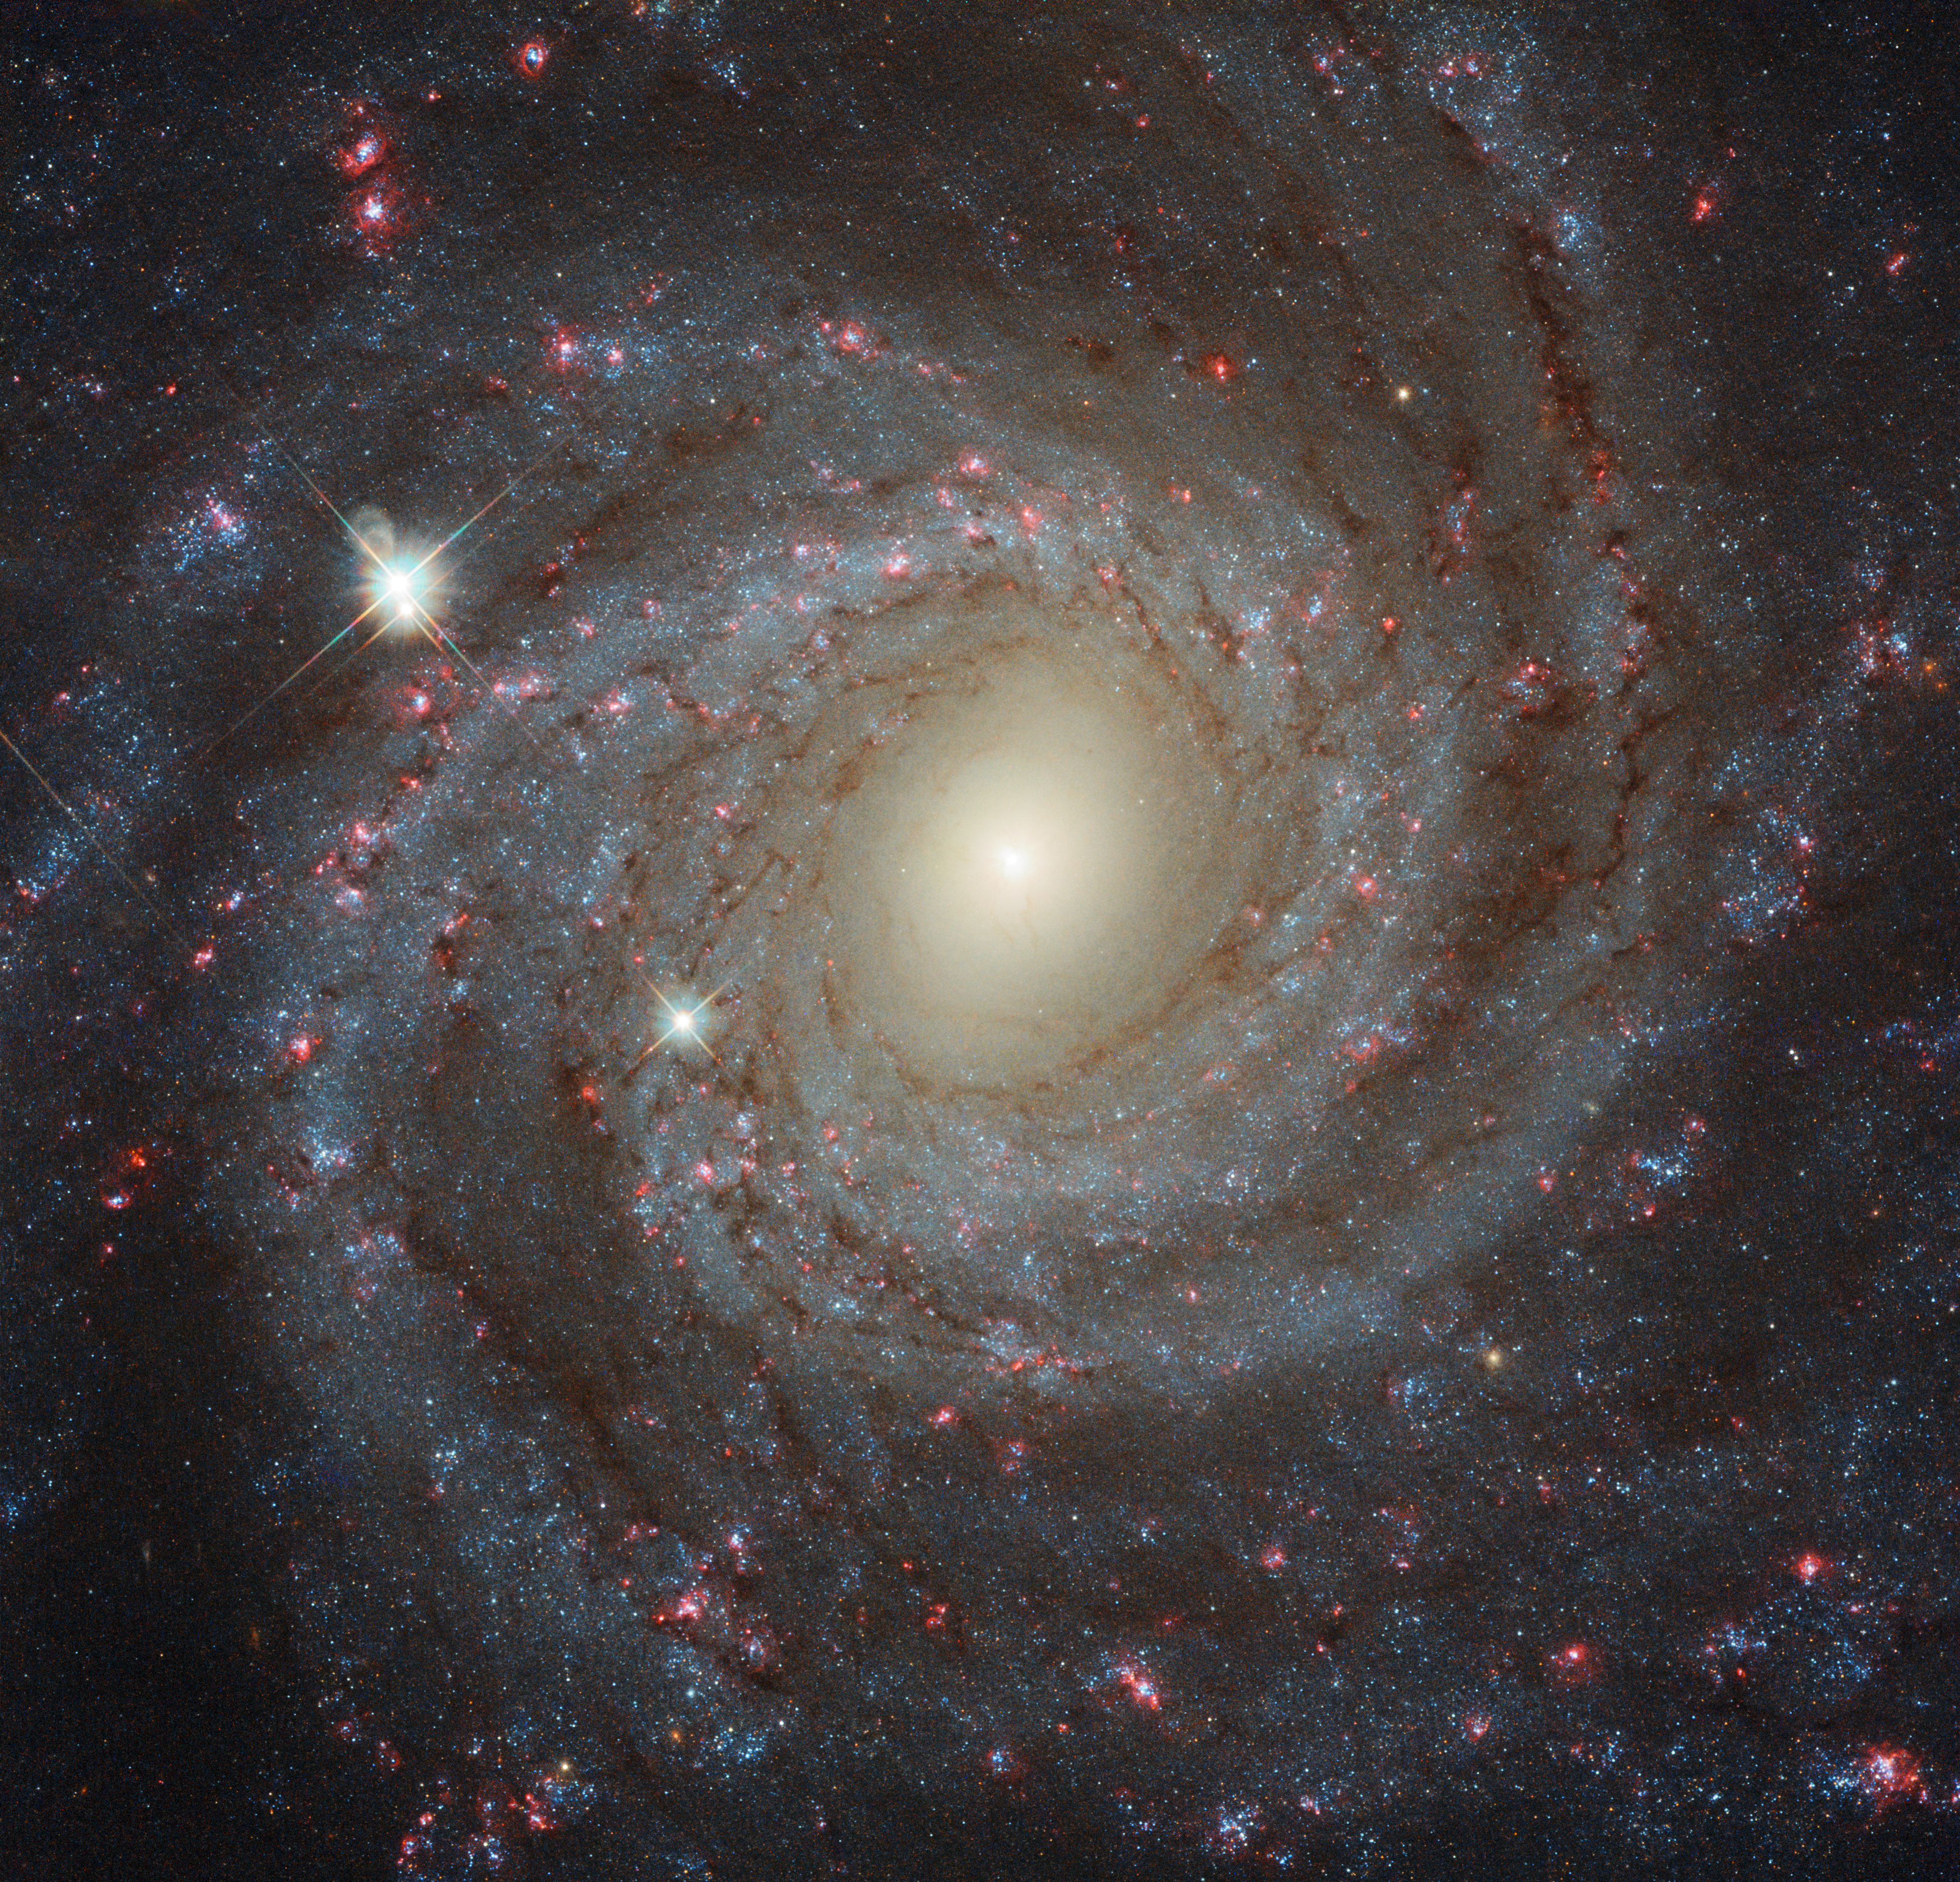

Multi-filter image of NGC 3344

This image of the spiral galaxy NGC 3344, located about 20 million light-years from Earth, is a composite of images taken through seven different filters. They cover wavelengths from the ultraviolet to the optical and the near-infrared. Together they create a detailed picture of the galaxy and allow astronomers to study many different aspects of it.

Credit: ESA/Hubble, NASA